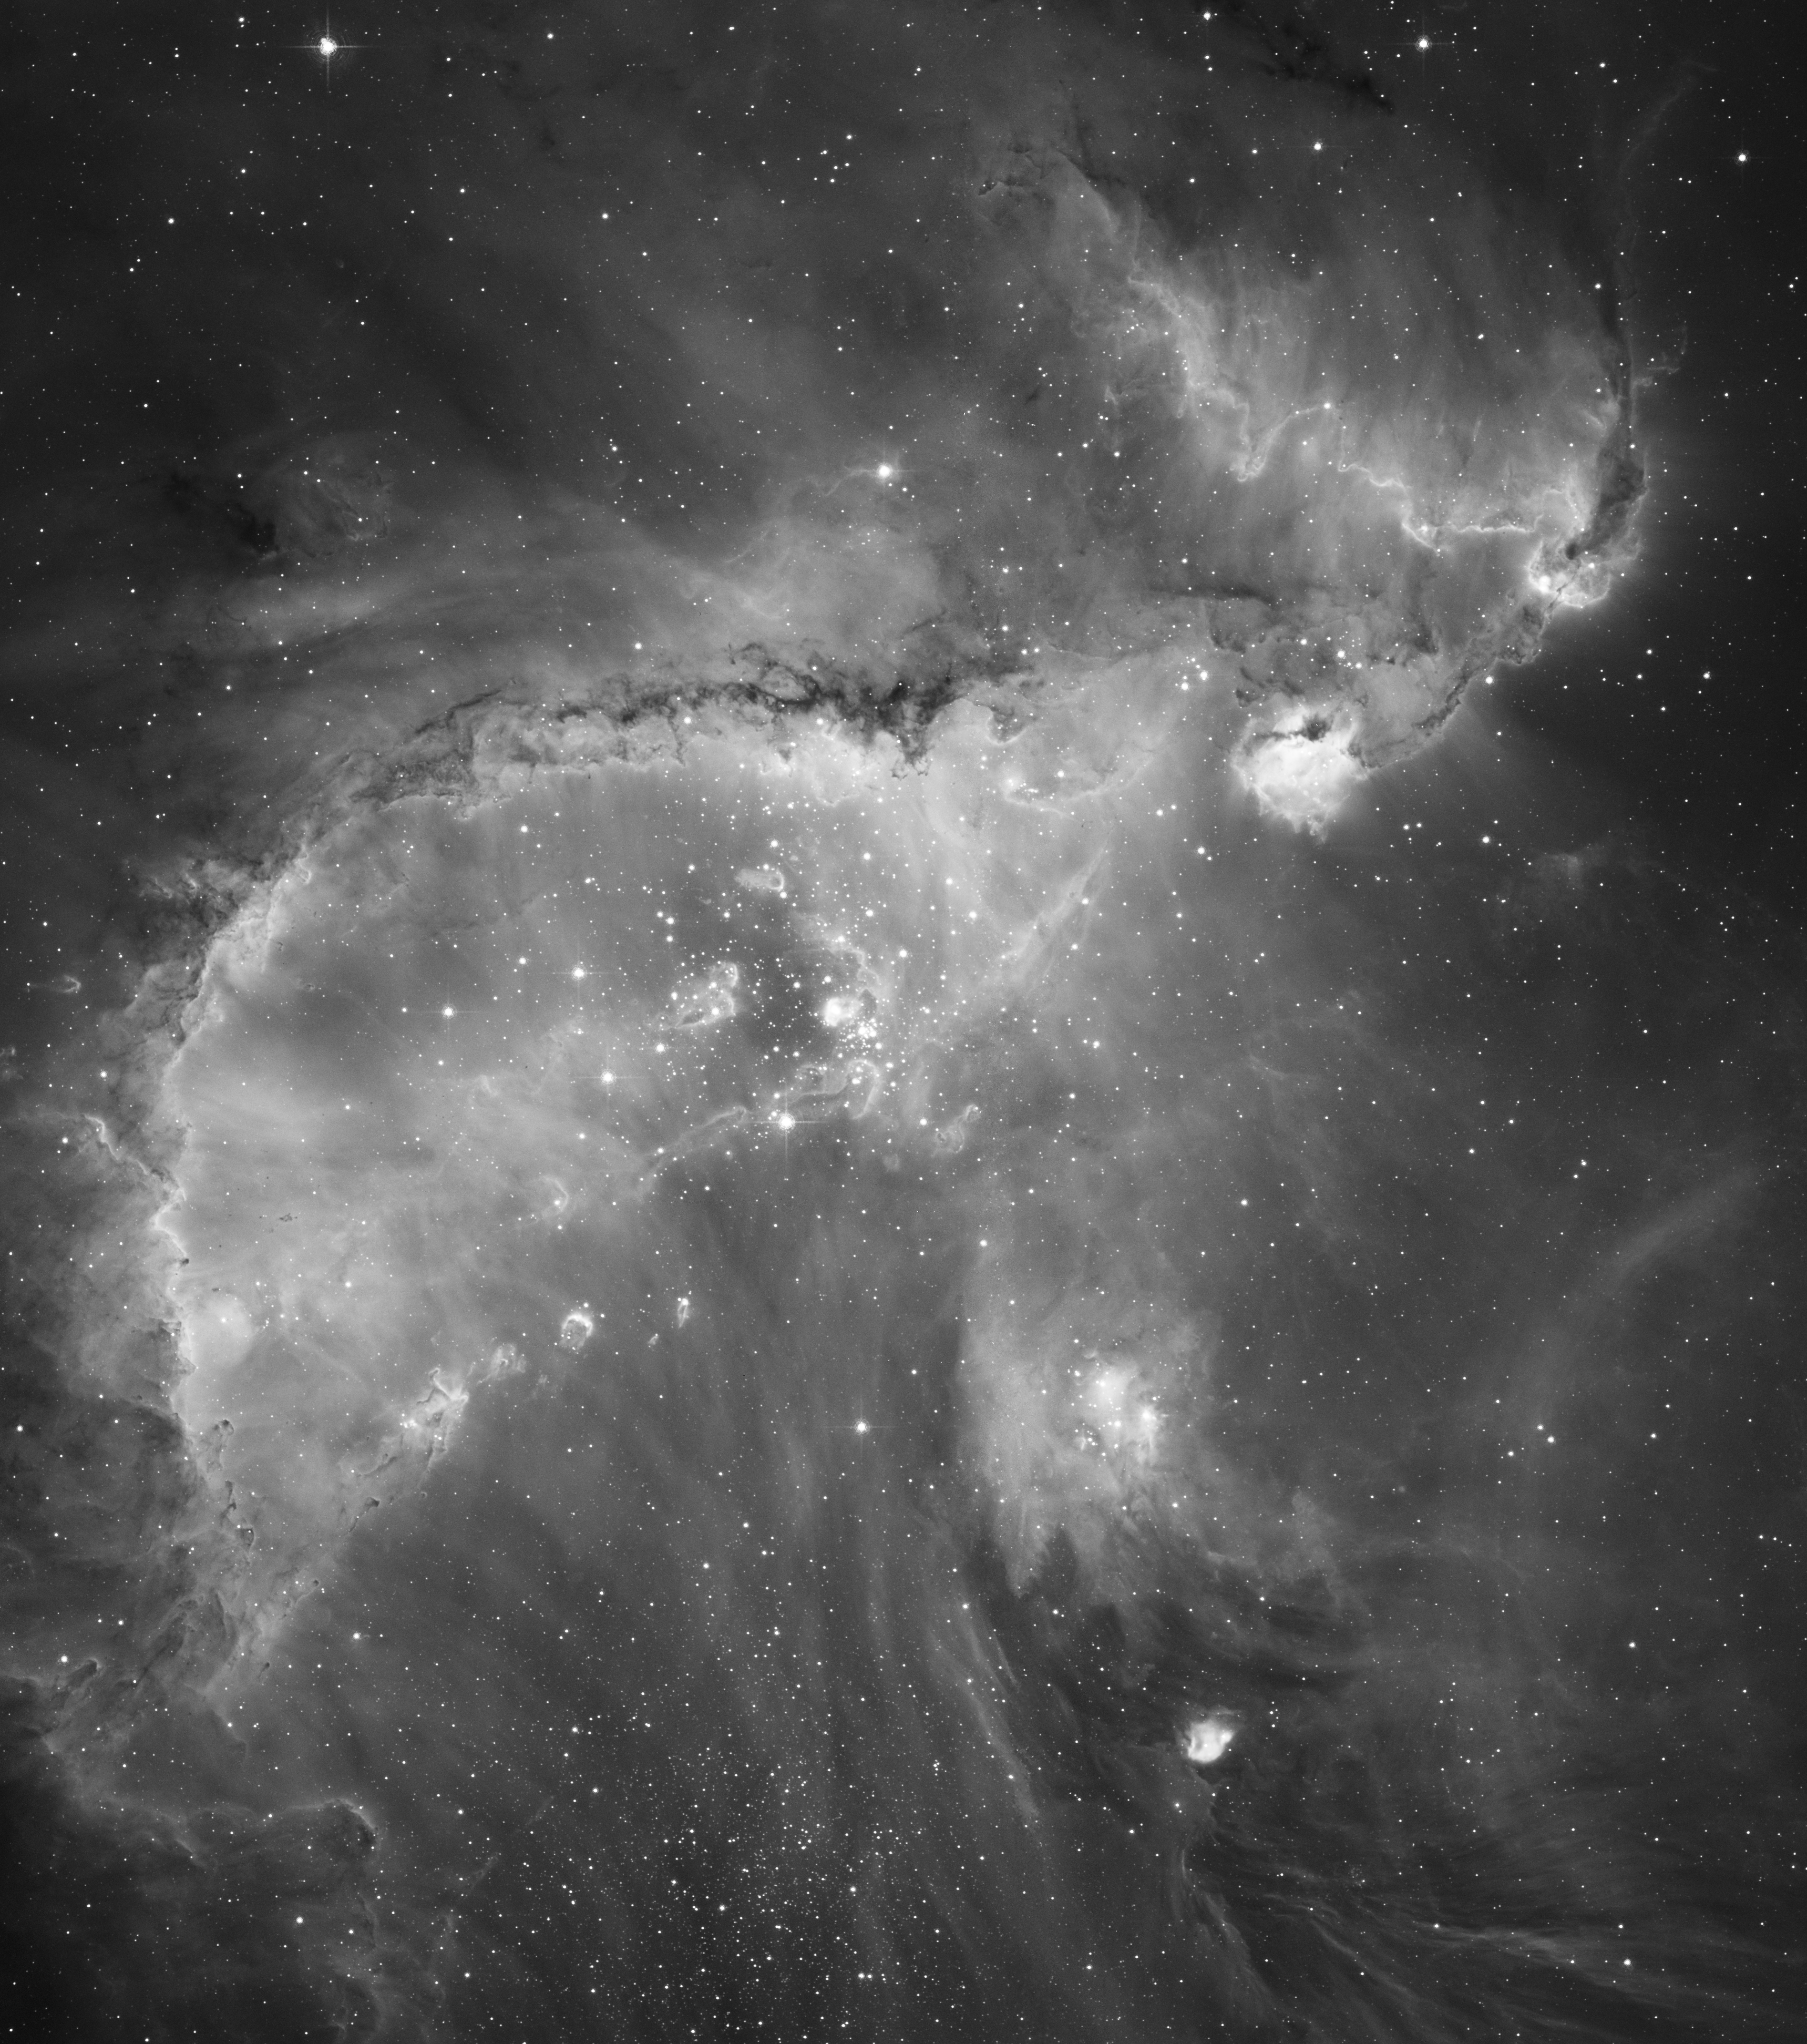

Hubble's black and white view of the Universe

Contained within the most massive and active star-forming region in the nearby galaxy, the Small Magellanic Cloud, star cluster NGC 346 delivers energetic radiation that excites nearby gas, causing it to glow. The result is one of the most dynamic and intricately detailed images of a nearby star-forming region that has ever been taken with NASA/ESA Hubble Space Telescope.

The complexity of the gas and dust that surrounds NGC 346 shows a series of arched, ragged filaments and a distinct ridge created when high-energy radiation from the young, hot stars eats into the denser areas of the nearby interstellar medium. The intricate, dark beaded edge of the ridge, seen from Hubble's perspective in silhouette, contains several small dust globules that point back towards the central cluster.

Energetic outflows and radiation from hot young stars are eroding the dense outer portions of the star-forming region, formally known as N66, exposing new stellar nurseries. The diffuse natal parts of the nebula block the energetic outflows from streaming away from the cluster, leaving a series of filaments marking the path of the outflows.

This image of NGC 346 and its surrounding star formation was taken with Hubble's Advanced Camera for Surveys using a filter which isolates light emitted by hydrogen gas. Individual images from Hubble's cameras retain no colour information as such, other than the colour of a filter, which selects a range of wavelengths from the full spectrum of light. A black and white (monochrome) image most realistically represents the range of brightness in such a single image. Colour images may be reconstructed by combining several images made through different filters and assigning a distinct colour to each image. Even without the added colour dimension, the wide range of grey tones in the black and white image reveals a great deal of the nebula's finely detailed structure.

Credit: NASA, ESA and A. Nota (ESA/STScI) (STScI/AURA)